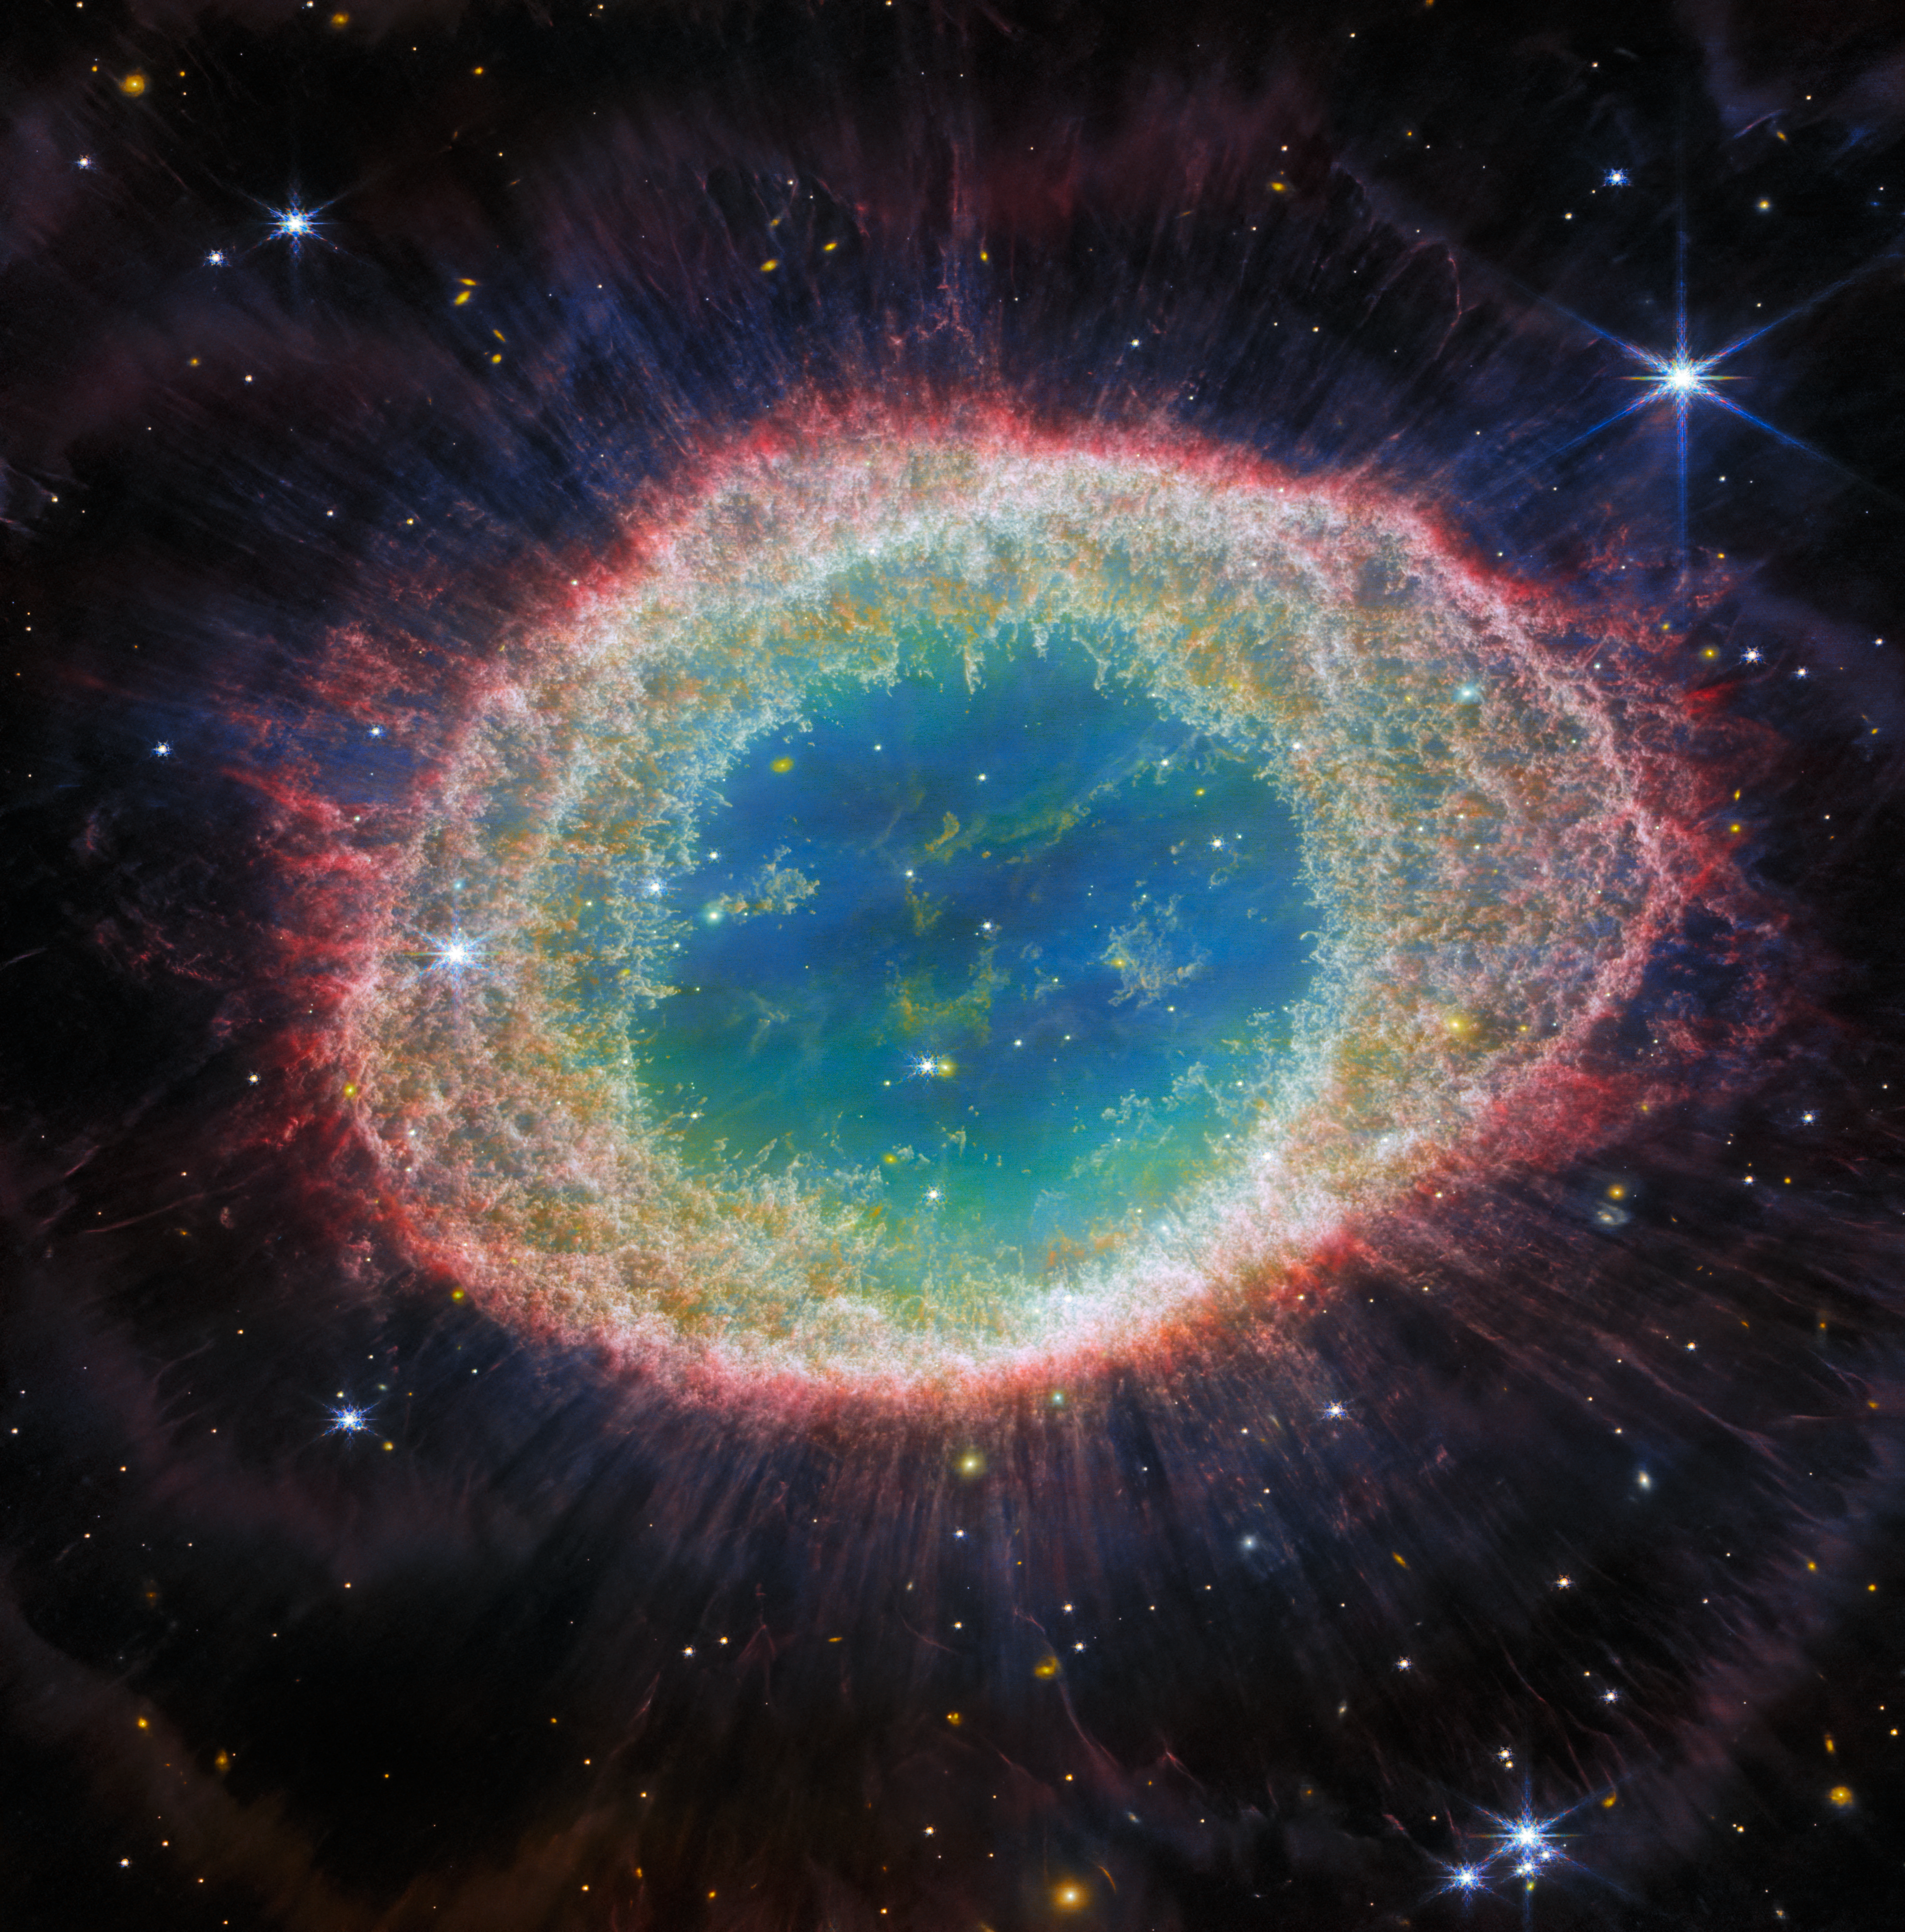

Webb captures detailed beauty of Ring Nebula (NIRCam image)

The NASA/ESA/CSA James Webb Space Telescope has observed the well-known Ring Nebula with unprecedented detail. Formed by a star throwing off its outer layers as it runs out of fuel, the Ring Nebula is an archetypal planetary nebula. Also known as M57 and NGC 6720, it is both relatively close to Earth at roughly 2,500 light-years away.

This new image provides unprecedented spatial resolution and spectral sensitivity. For example, the intricate details of the filament structure of the inner ring are particularly visible in this dataset.

There are some 20,000 dense globules in the nebula, which are rich in molecular hydrogen. In contrast, the inner region shows very hot gas. The main shell contains a thin ring of enhanced emission from
carbon-based molecules known as polycyclic aromatic hydrocarbons (PAHs). Roughly ten concentric arcs are located just beyond the outer edge of the main ring. The arcs are thought to originate from the interaction of the central star with a low-mass companion orbiting at a distance comparable to that between the Earth and the dwarf planet Pluto. In this way, nebulae like the Ring Nebula reveal a kind of astronomical archaeology, as astronomers study the nebula to learn about the star that created it.

Credit: ESA/Webb, NASA, CSA, M. Barlow, N. Cox, R. Wesson